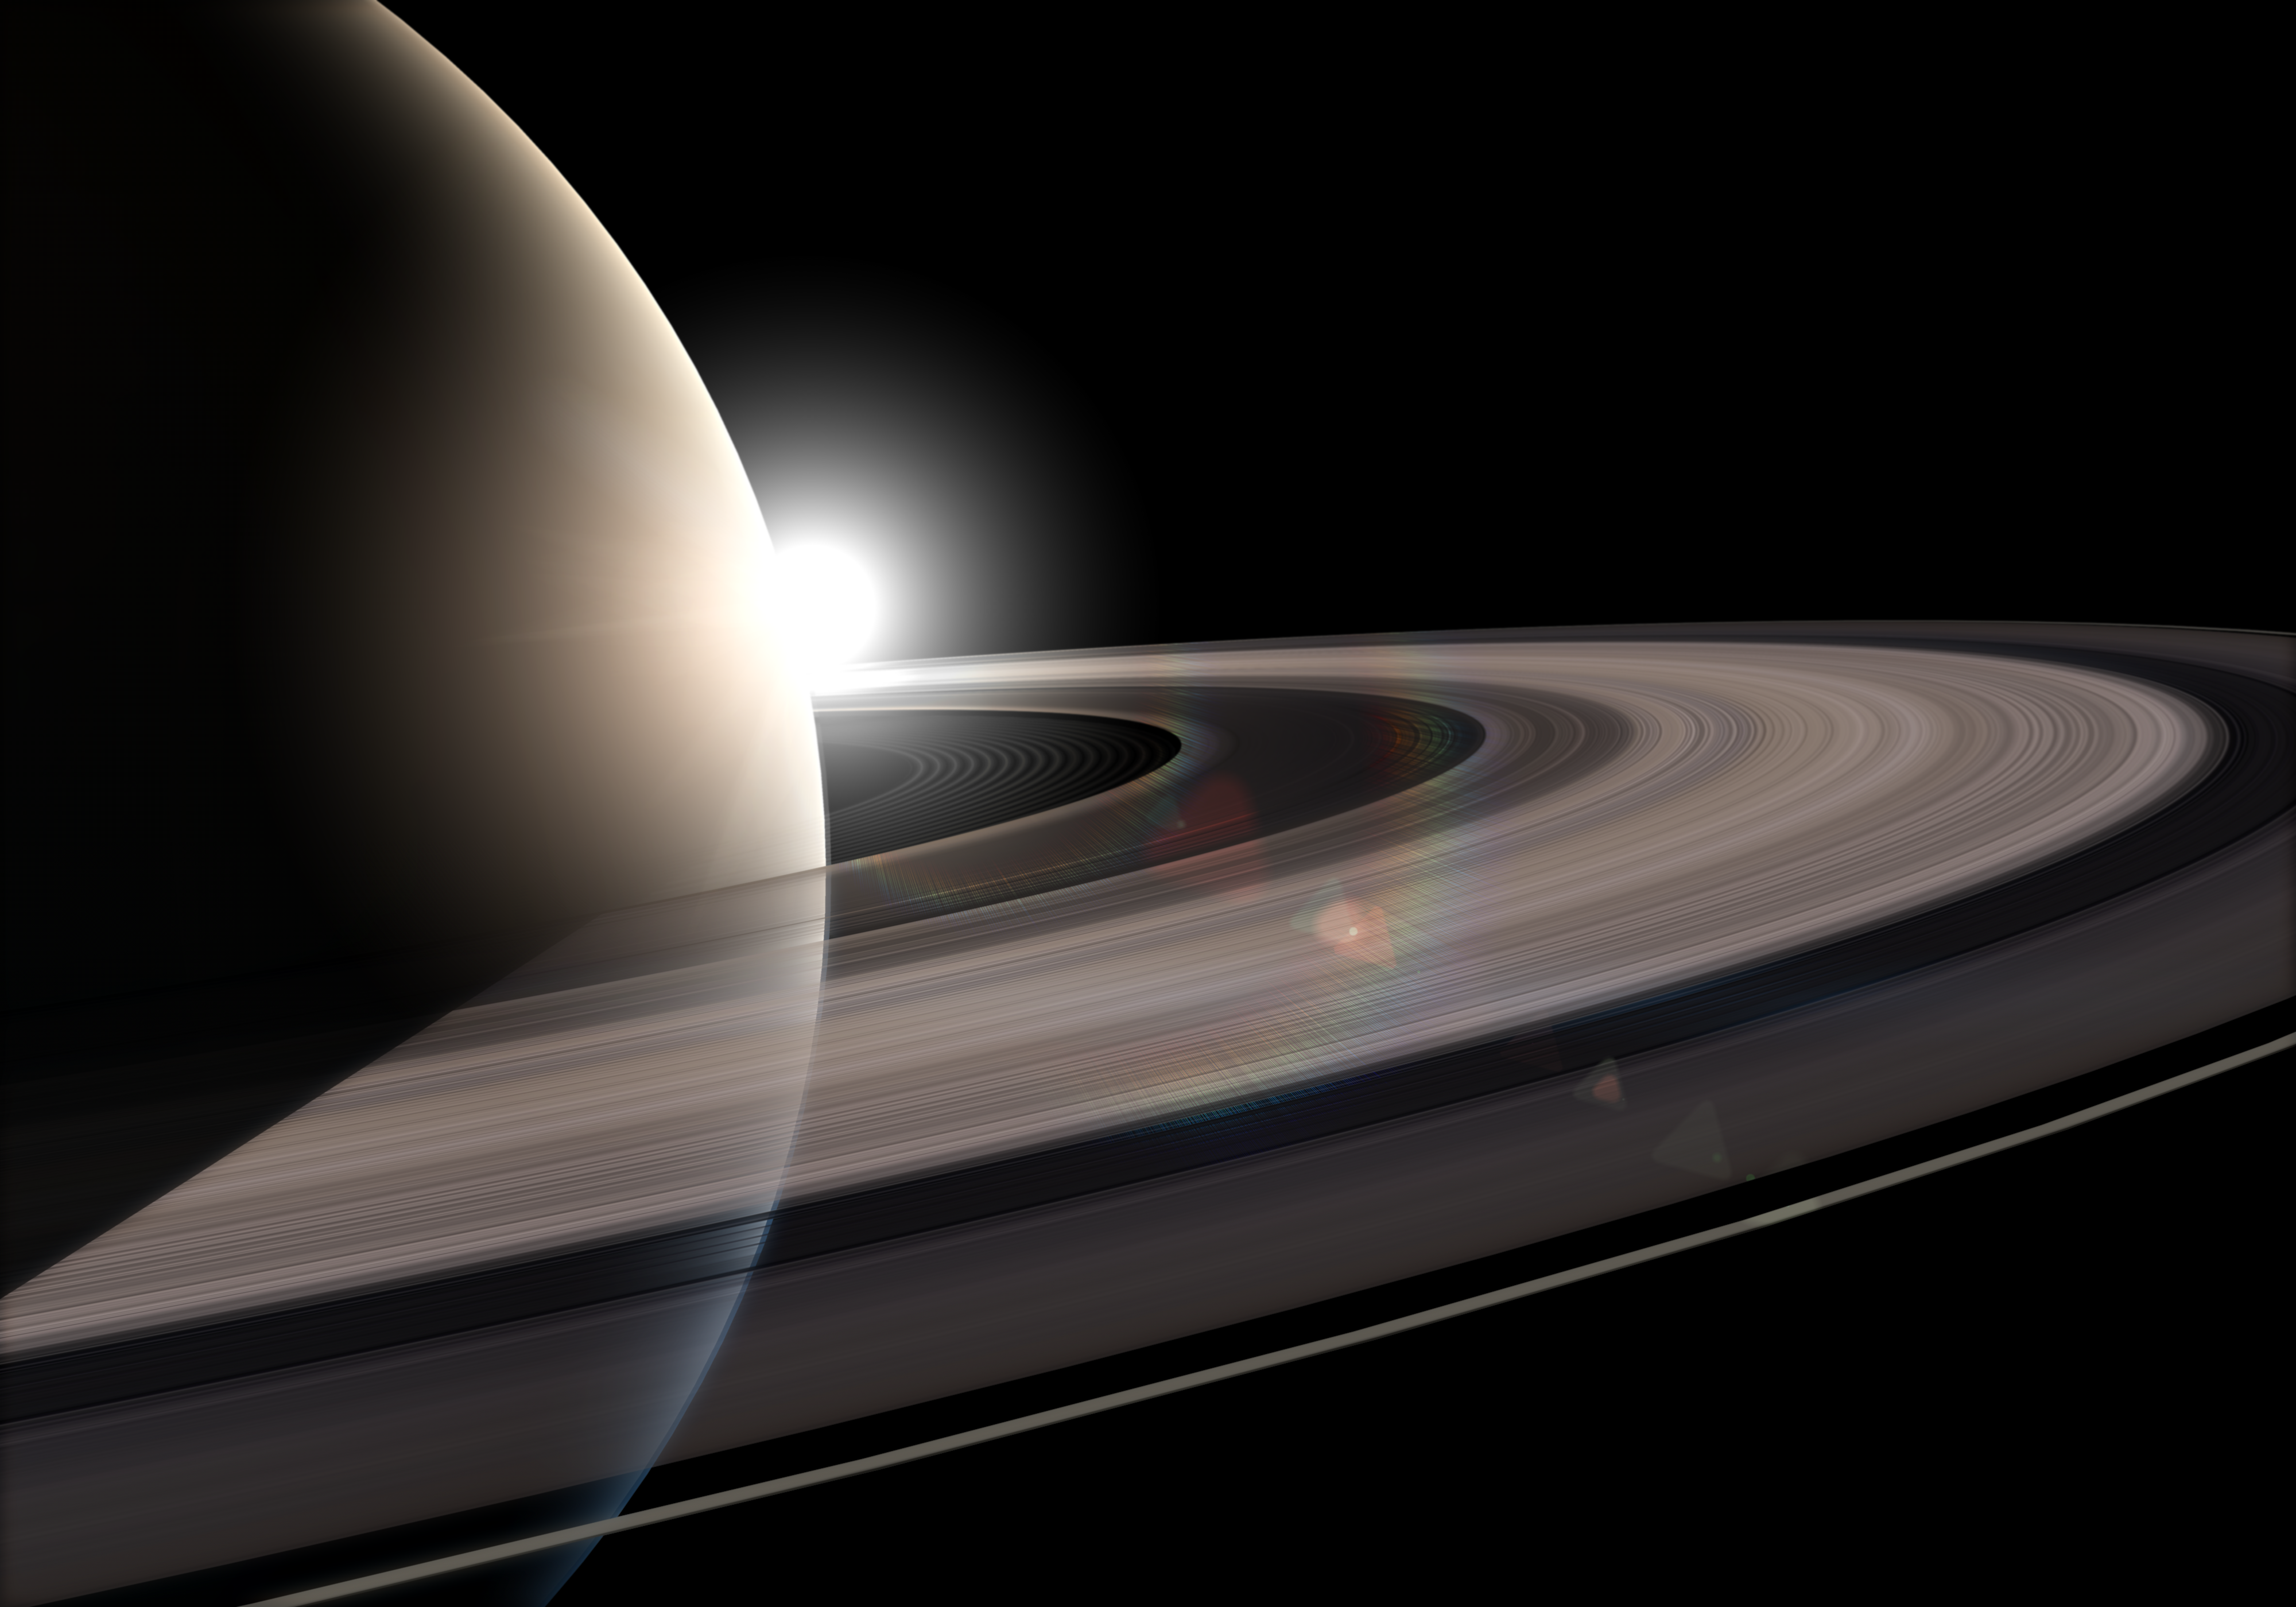

Artist's impression of Saturn's rings

This is an artist's impression showing the planet Saturn and its rings.

Credit: NASA, ESA, Martin Kornmesser (ESA/Hubble)